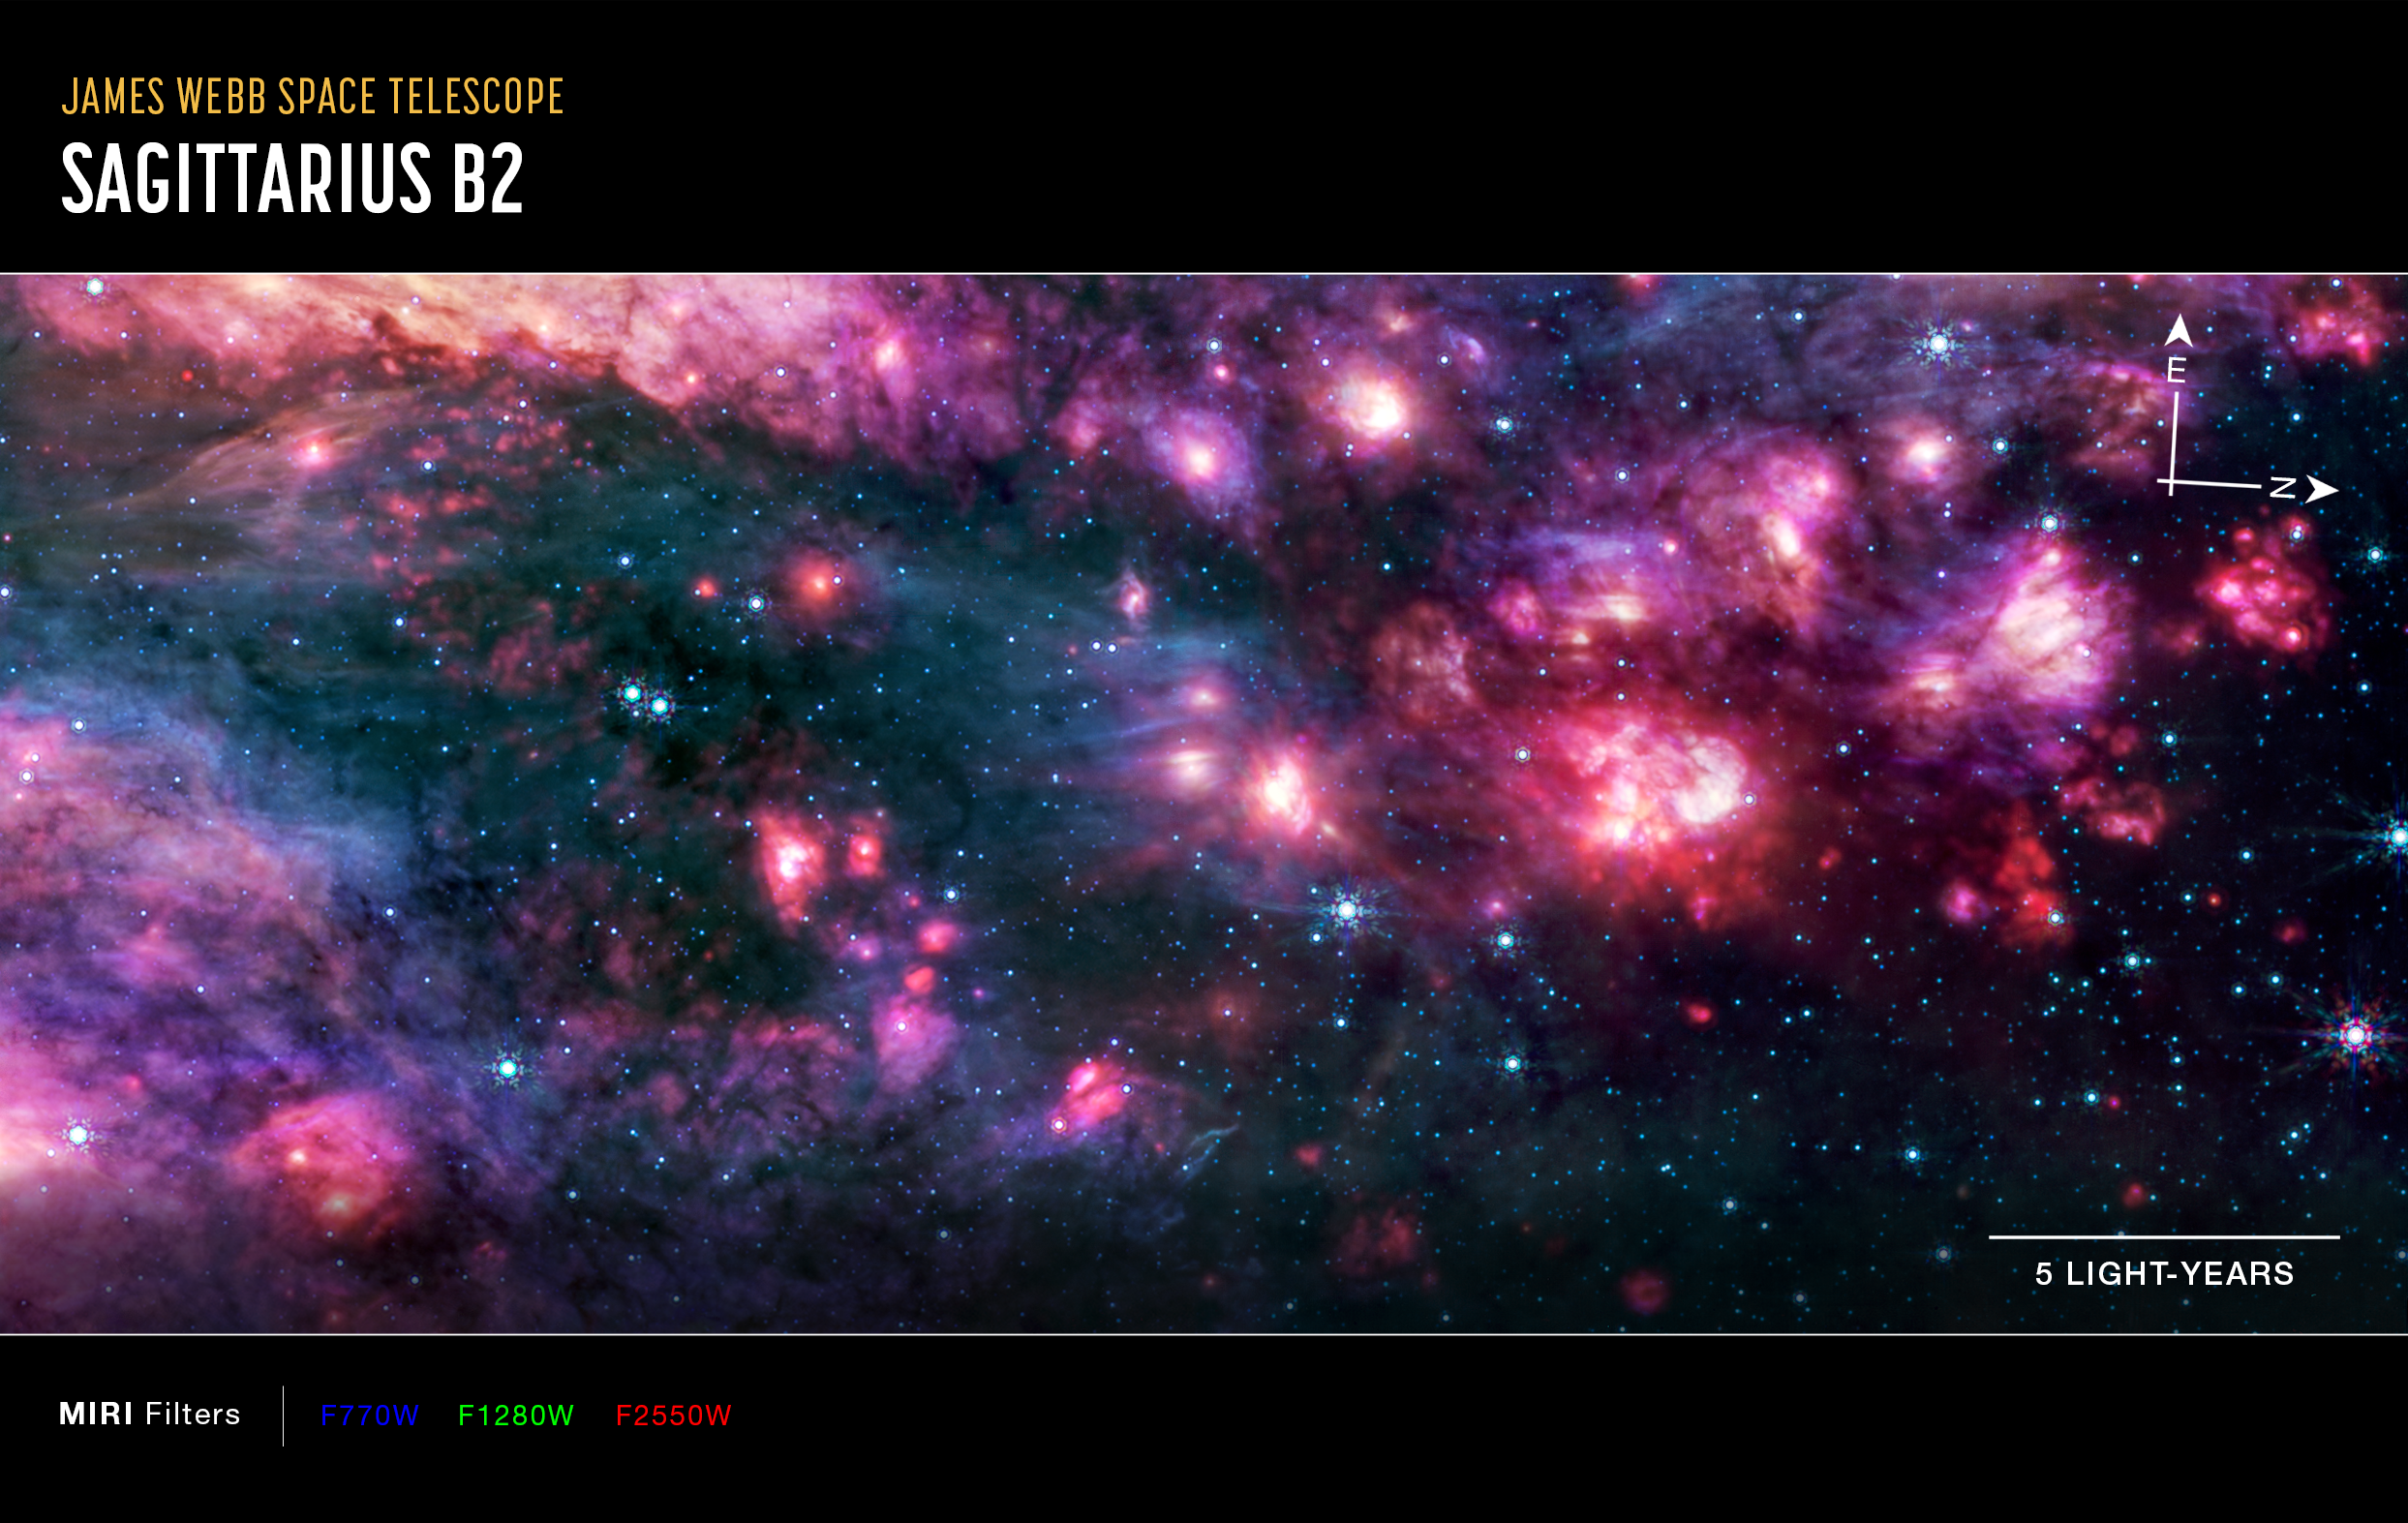

Sagittarius B2 (MIRI image, annotated)

This image of the Sagittarius B2 (Sgr B2) molecular cloud, captured by Webb’s MIRI (Mid-Infrared Instrument) includes compass arrows, scale bar, and colour key for reference.

To create this image, mid-infrared wavelengths of light have been translated into visible-light colours. The colour key at the bottom shows which MIRI filters were used, and which visible-light colour was assigned to that filter.

The north and east compass arrows show the orientation of the image on the sky. Note that the relationship between north and east on the sky (as seen from below) is flipped relative to direction arrows on a map of the ground (as seen from above).

Credit: NASA, ESA, CSA, STScI, A. Ginsburg (University of Florida), N. Budaiev (University of Florida), T. Yoo (University of Florida). Image processing: A. Pagan (STScI)